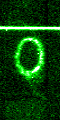

STIS chemically analyzes the ring around SN 1987a

These images from the Hubble's Space Telescope Imaging Spectrograph (STIS) provide a new and unprecedented look at one of the most unique and complex structures in the universe -- a light-year wide ring of glowing gas around supernova 1987A, the nearest stellar explosion in 400 years, which occurred in February 1987.

Credit: George Sonneborn (GSFC) and NASA/ESA